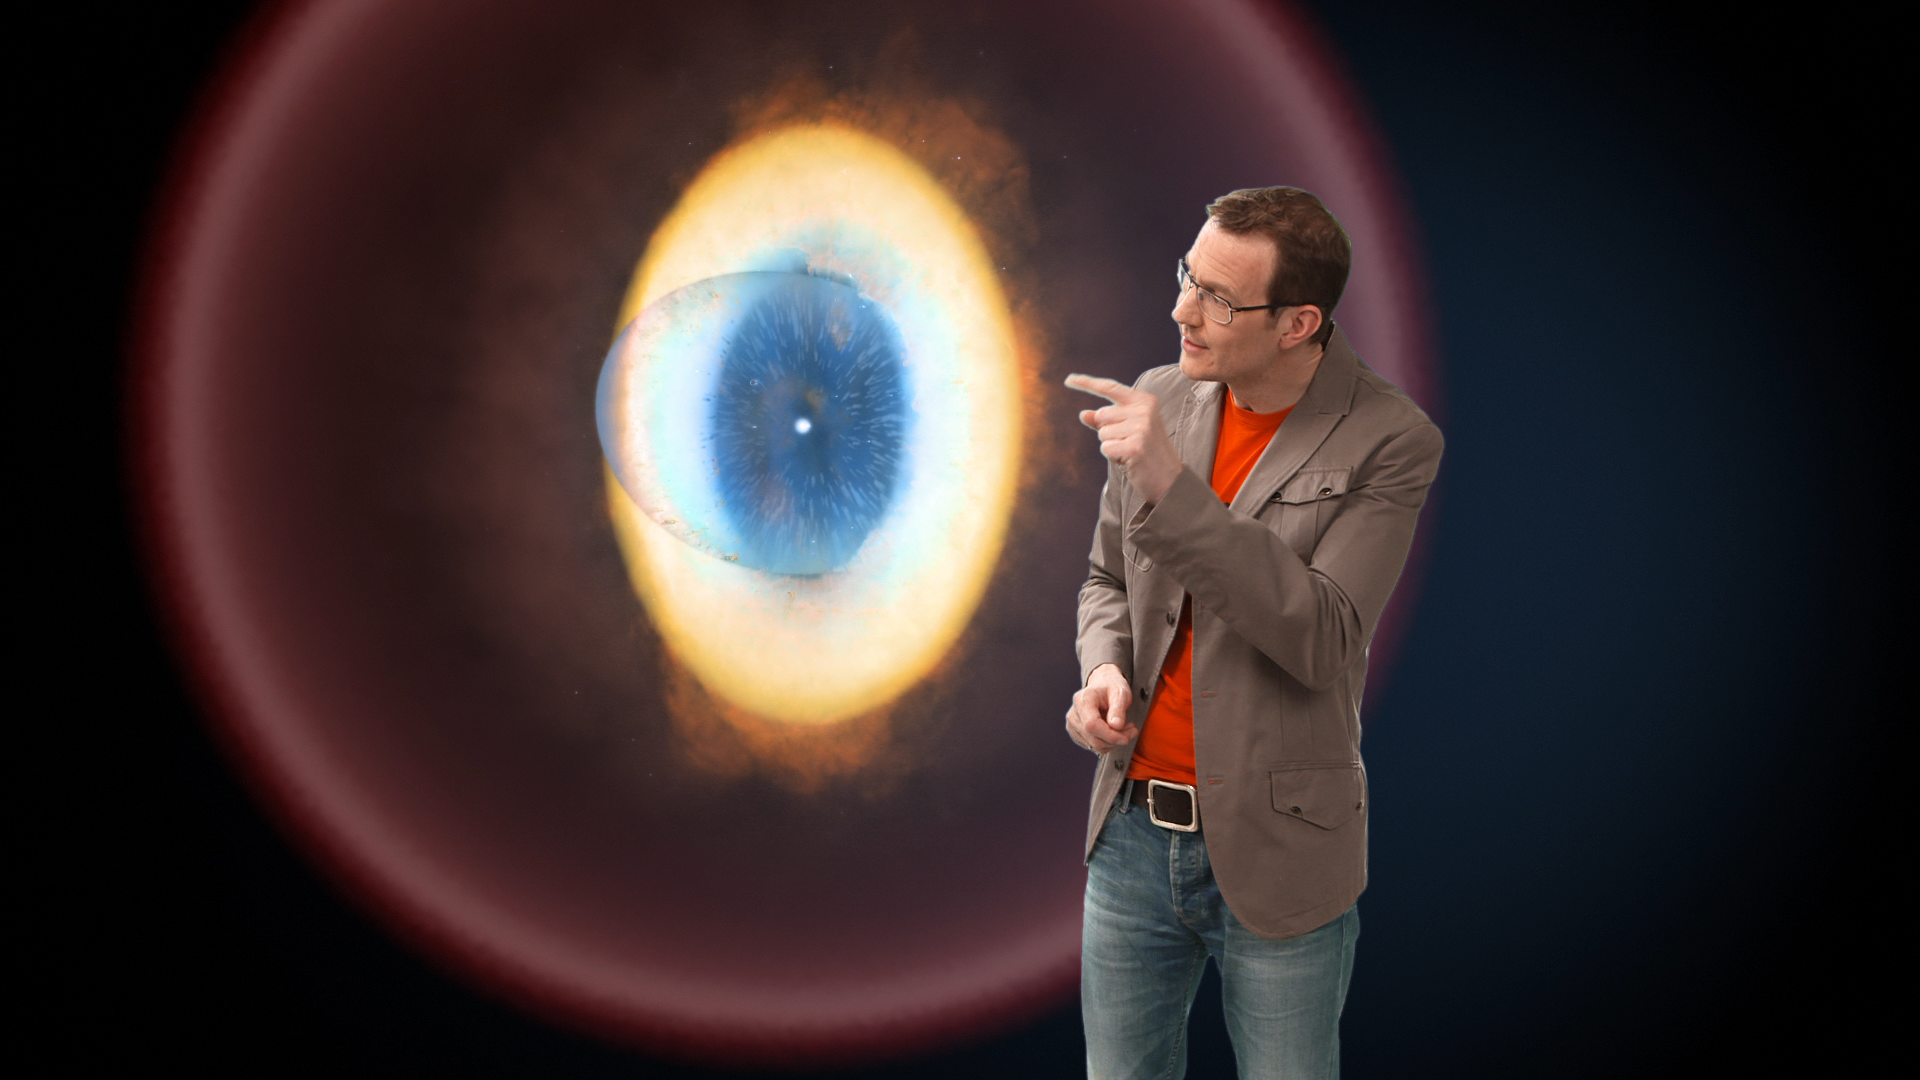

Screenshot of Hubblecast 66

Hubblecast 66 can be downloaded in a range of formats including HD here

Credit: NASA & ESA